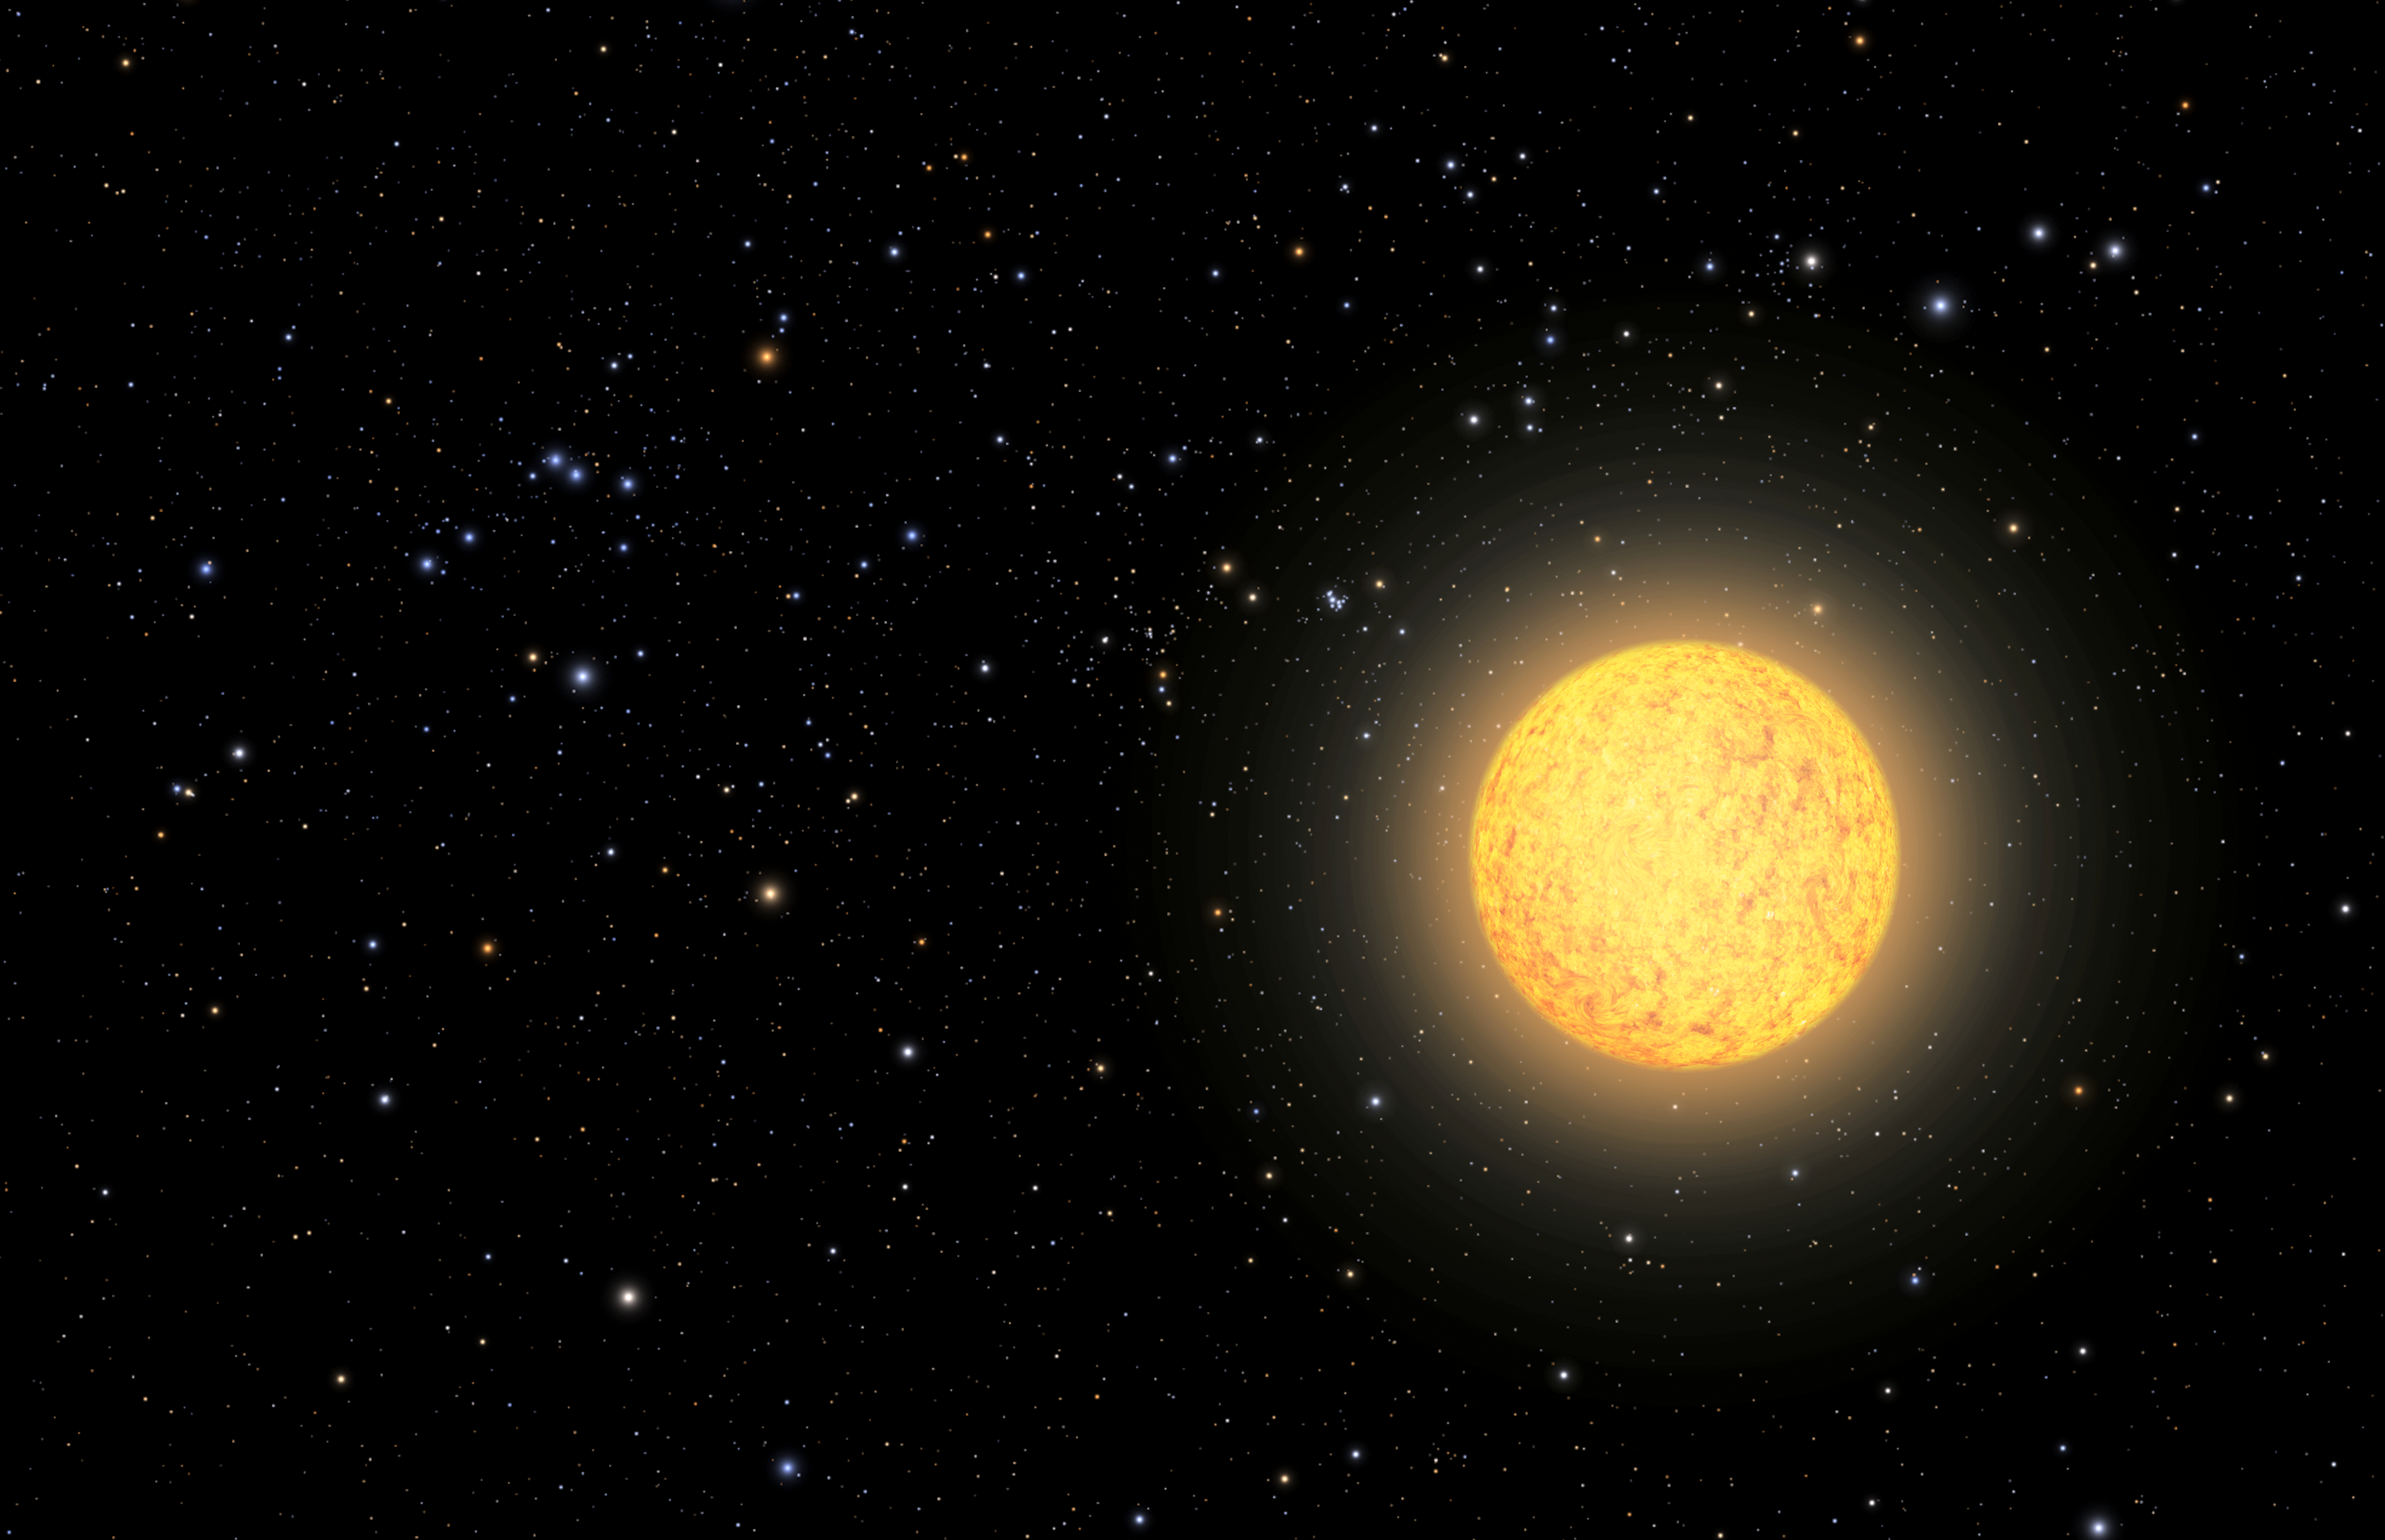

Artist’s view of ancient star

This is an illustration of the oldest star ever found in our solar neighborhood. The ageing star, catalogued as HD 140283, lies over 190 light-years from Earth. NASA/ESA Hubble Space Telescope observations narrowed the measurement uncertainty on the star's distance, and this helped to refine the calculation of a more precise age of 14.5 billion years (plus or minus 800 million years).

Because the ageing star is relatively nearby, familiar stars and constellations as seen from Earth are visible in the surrounding sky, but in different locations. In the upper left is the constellation of Orion (The Hunter), which looks distorted from our new perspective in space. Just to the upper left of the foreground star is the Pleiades cluster. To the lower left of the cluster, our Sun has dimmed to an apparent magnitude of +7, placing it below naked-eye visibility.

Credit: NASA, ESA, A. Feild and F. Summers (STScI)